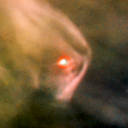

106-417

One of 42 new proplyds discovered in the Orion Nebula, 106-417 is one of the bright proplyds that lies relatively close to the nebula’s brightest star, Theta 1 Orionis C. Resembling a boomerang, this proplyd is surrounded by a shock wave that is caused by stellar wind from the massive Theta 1 Orionis C interacting with gas in the nebula.

Credit: NASA/ESA and L. Ricci (ESO)